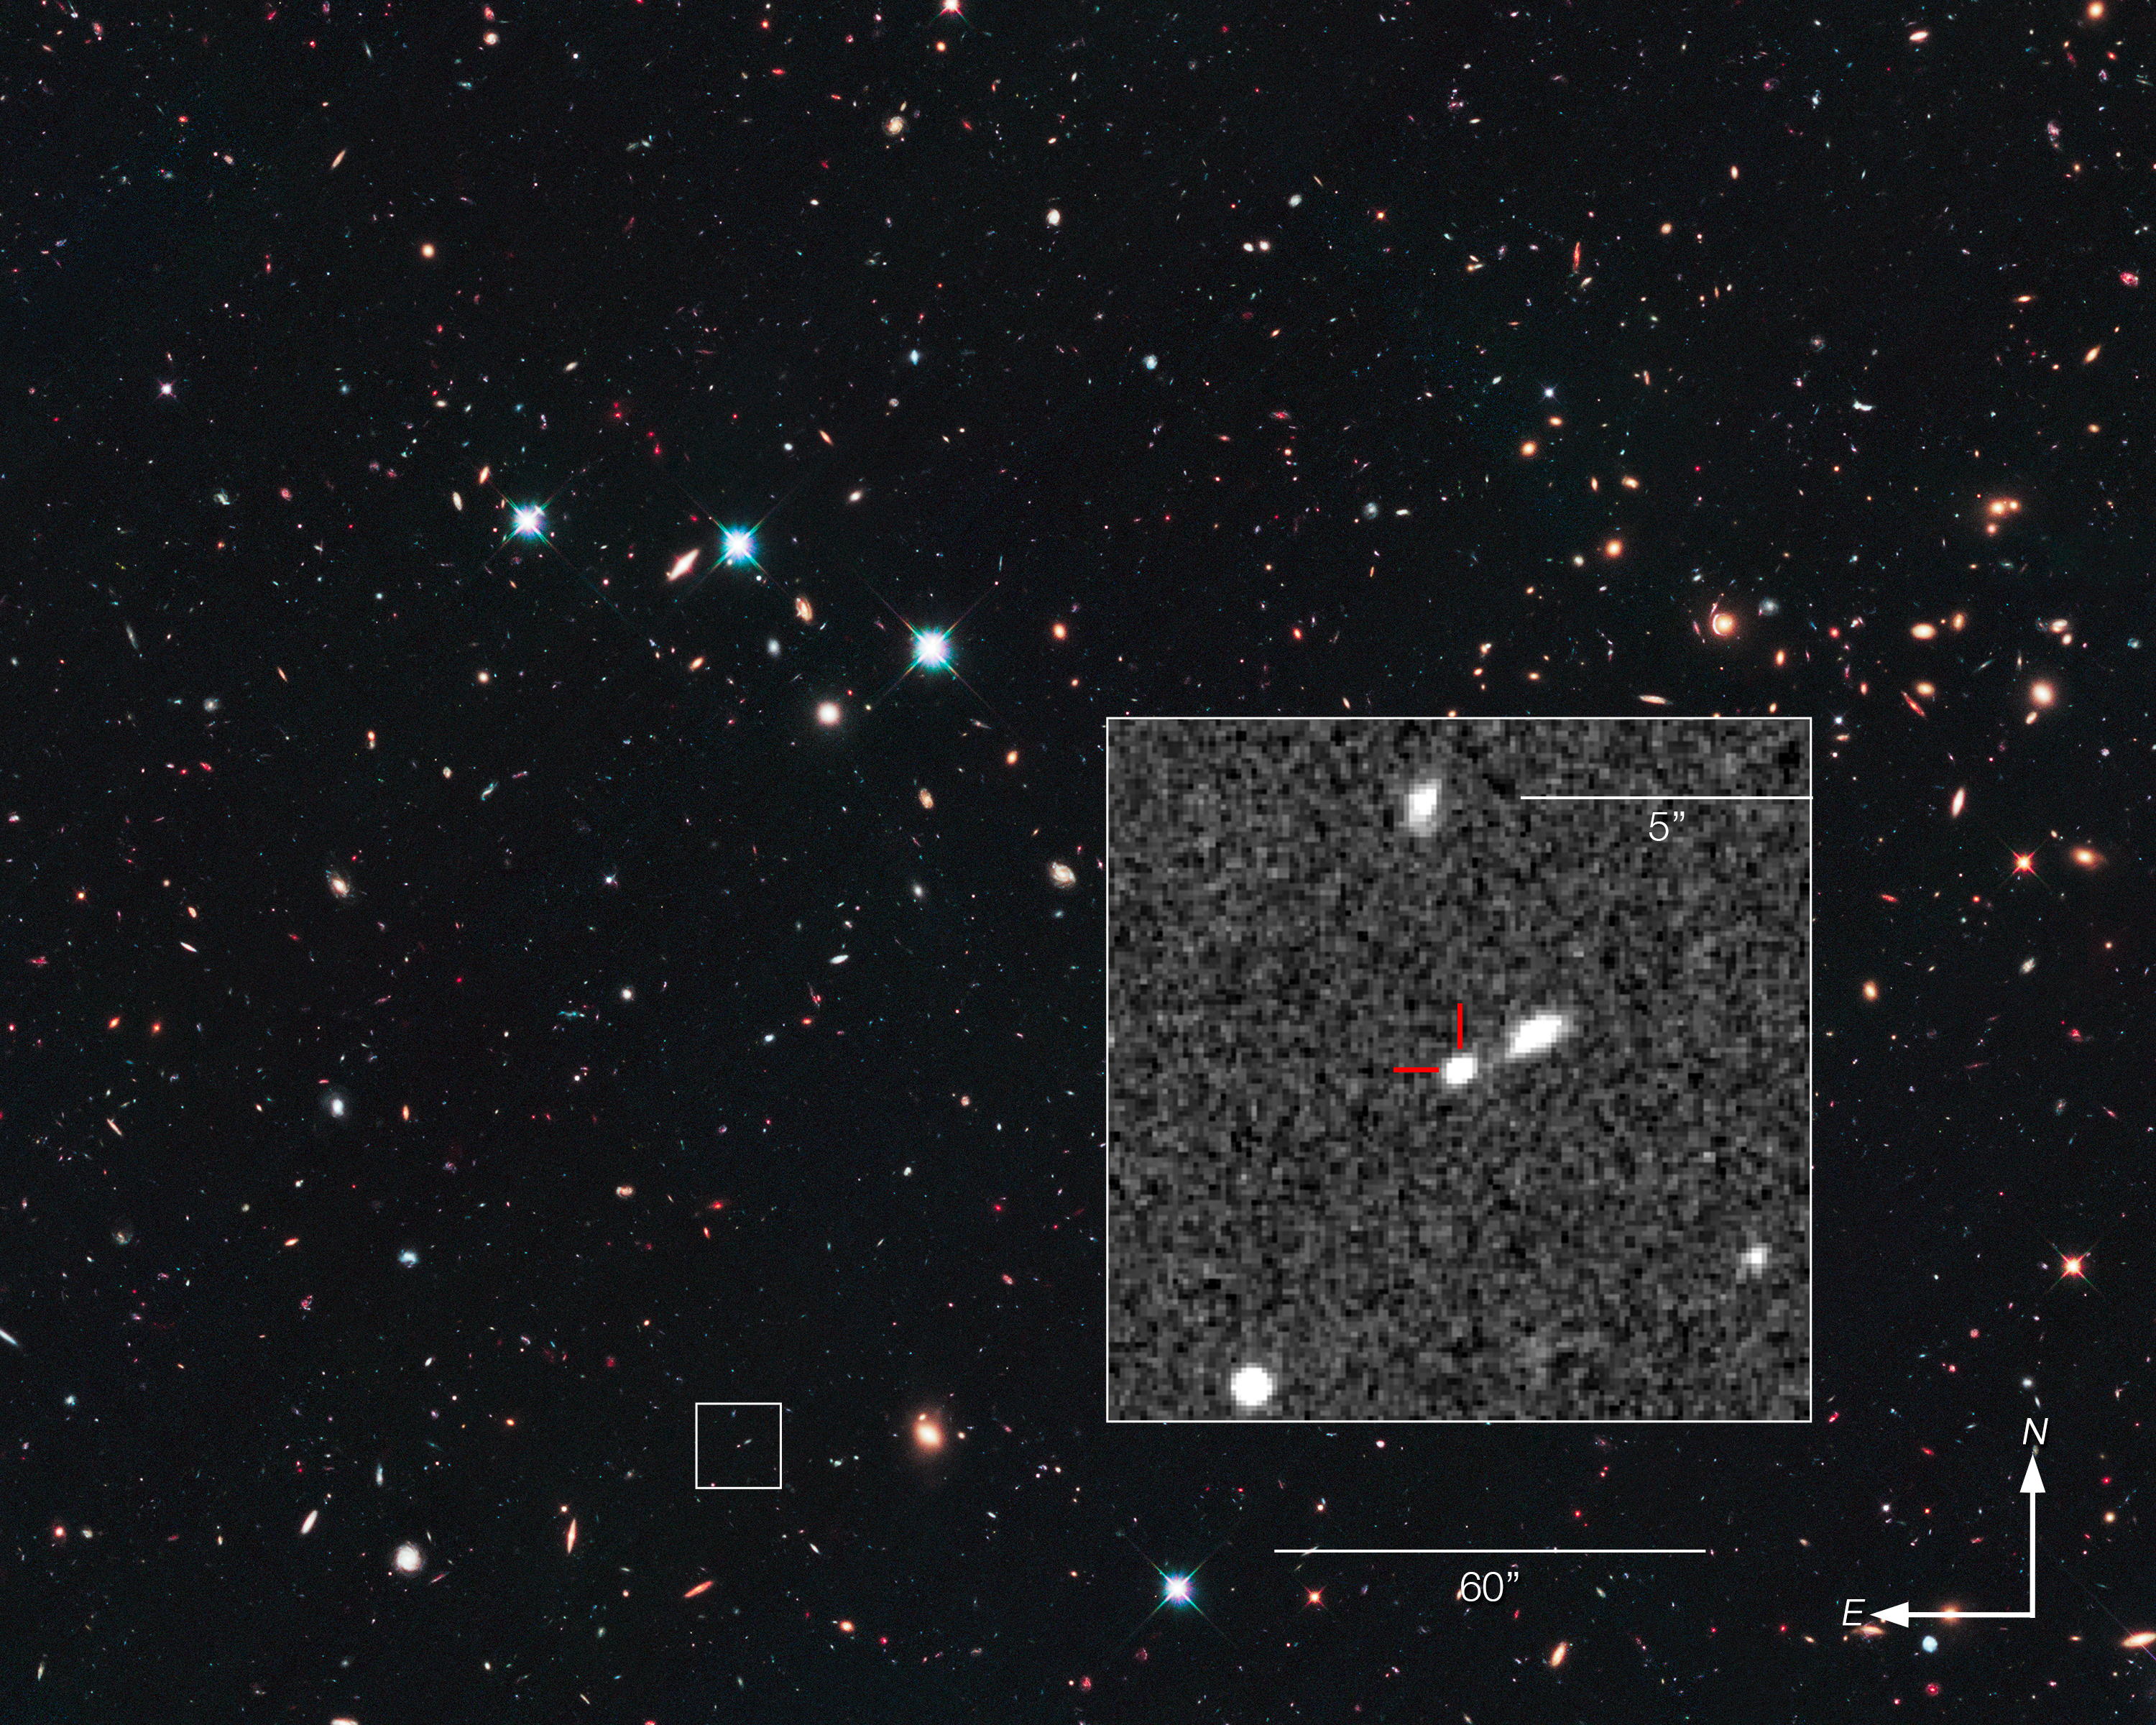

Record-breaking supernova in the CANDELS Ultra Deep Survey (compass and scale)

This is a NASA/ESA Hubble Space Telescope view looking long ago and far away at a supernova that exploded over 10 billion years ago — the most distant Type Ia supernova ever detected. The supernova’s light is just arriving at Earth, having travelled more than 10 billion light-years (redshift 1.914) across space.

This image reveals the sky around the supernova, known as SN UDS10Wil, which is shown inset within its host galaxy.

Credit: NASA, ESA, and Z. Levay (STScI)